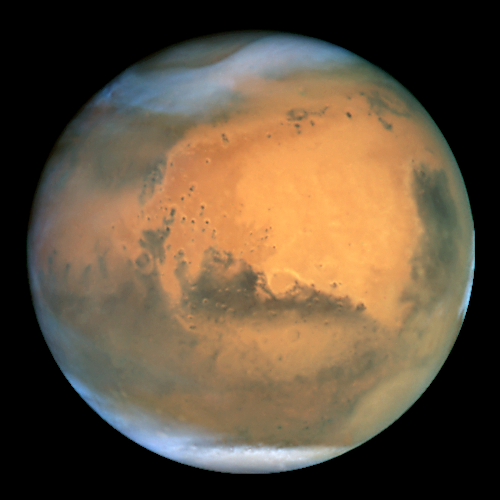

The best Earth-based view of Mars ever

Frosty white water ice clouds and swirling orange dust storms above a vivid rusty landscape reveal Mars as a dynamic planet in this sharpest view ever obtained by an Earth-based telescope. The Earth-orbiting Hubble telescope snapped this picture on June 26, when Mars was approximately 43 million miles (68 million km) from Earth - its closest approach to our planet since 1988. Hubble can see details as small as 10 miles (16 km) across. Especially striking is the large amount of seasonal dust storm activity seen in this image. One large storm system is churning high above the northern polar cap [top of image], and a smaller dust storm cloud can be seen nearby. Another large duststorm is spilling out of the giant Hellas impact basin in the Southern Hemisphere [lower right].

Acknowledgements: J. Bell (Cornell U.), P. James (U. Toledo), M. Wolff (Space Science Institute), A. Lubenow (STScI), J. Neubert (MIT/Cornell)

Credit: NASA/ESA and The Hubble Heritage Team STScI/AURA